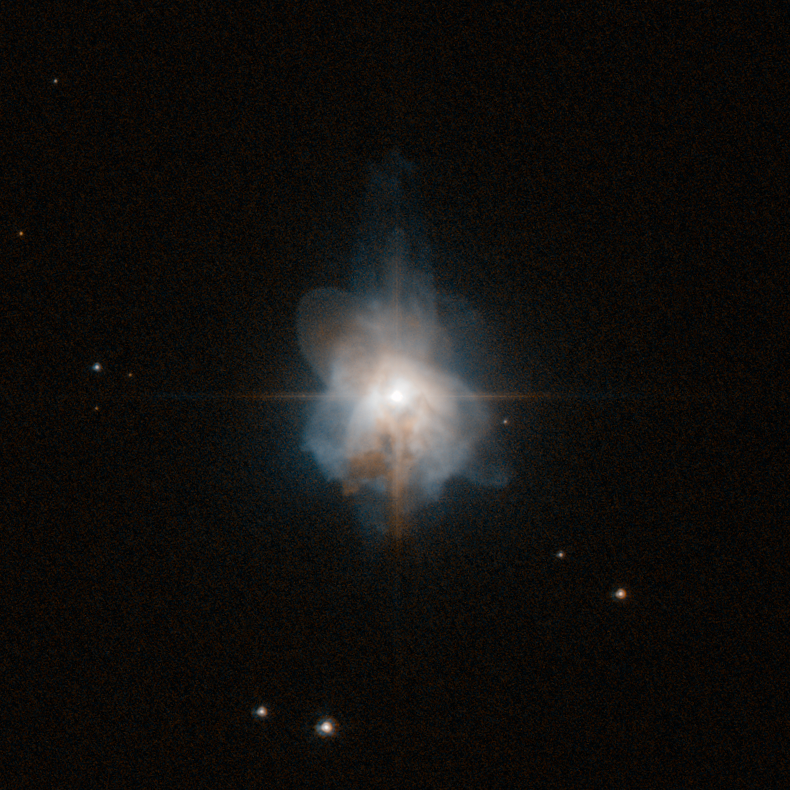

A sheep in Wolf-Rayet’s clothing

It’s well known that the Universe is changeable: even the stars that appear static and predictable every night are subject to change.

This image from the NASA/ESA Hubble Space Telescope shows planetary nebula Hen 3-1333. Planetary nebulae are nothing to do with planets — they actually represent the death throes of mid-sized stars like the Sun. As they puff out their outer layers, large, irregular globes of glowing gas expand around them, which appeared planet-like through the small telescopes that were used by their first discoverers.

The star at the heart of Hen 3-1333 is thought to have a mass of around 60% that of the Sun, but unlike the Sun, its apparent brightness varies substantially over time. Astronomers believe this variability is caused by a disc of dust which lies almost edge-on when viewed from Earth, which periodically obscures the star.

It is a Wolf–Rayet type star — a late stage in the evolution of Sun-sized stars. These are named after (and share many observational characteristics with) Wolf–Rayet stars, which are much larger. Why the similarity? Both Wolf–Rayet and Wolf–Rayet type stars are hot and bright because their helium cores are exposed: the former because of the strong stellar winds characteristic of these stars; the latter because the outer layers of the stars have been puffed away as the star runs low on fuel.

The exposed helium core, rich with heavier elements, means that the surfaces of these stars are far hotter than the Sun, typically 25 000 to 50 000 degrees Celsius (the Sun has a comparatively chilly surface temperature of just 5500 degrees Celsius).

So while they are dramatically smaller in size, the Wolf–Rayet type stars such as the one at the core of Hen 3-1333 effectively mimic the appearance of their much bigger and more energetic namesakes: they are sheep in Wolf–Rayet clothing.

This visible-light image was taken by the high resolution channel of Hubble’s Advanced Camera for Surveys. The field of view is approximately 26 by 26 arcseconds.

Credit: ESA/Hubble & NASA